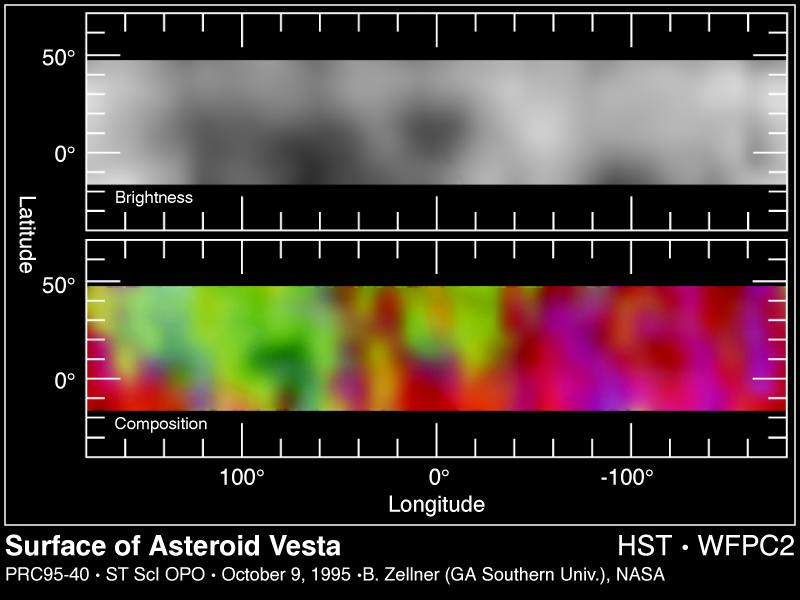

Surface of Asteroid Vesta

These two maps are derived from images of asteroid 4 Vesta taken between November 28 and December 1, 1994 with the Wide Field Planetary Camera-2 (in PC mode) aboard NASA/ESA Hubble Space Telescope.

Top Image

Surface Brightness Map of Vesta - This map shows that, unlike most asteroids, Vesta's surface is significantly varied with a dark hemisphere and a light hemisphere. The surface markings may represent ancient igneous activity such as lava flows and, in addition, regions where major impacts have stripped away the crust revealing mantle material below the crust.

Bottom Image

Surface Composition Map of Vesta - This false-color composite map of Vesta results show that all of Vesta's surface is igneous, indicating that either the entire surface was once melted, or lava flowing from its interior once completely covered its surface. The map shows that Vesta has two distinct hemispheres containing two different types of solidified lava called basalts.

Credit: Ben Zellner (Georgia Southern University) and NASA/ESA